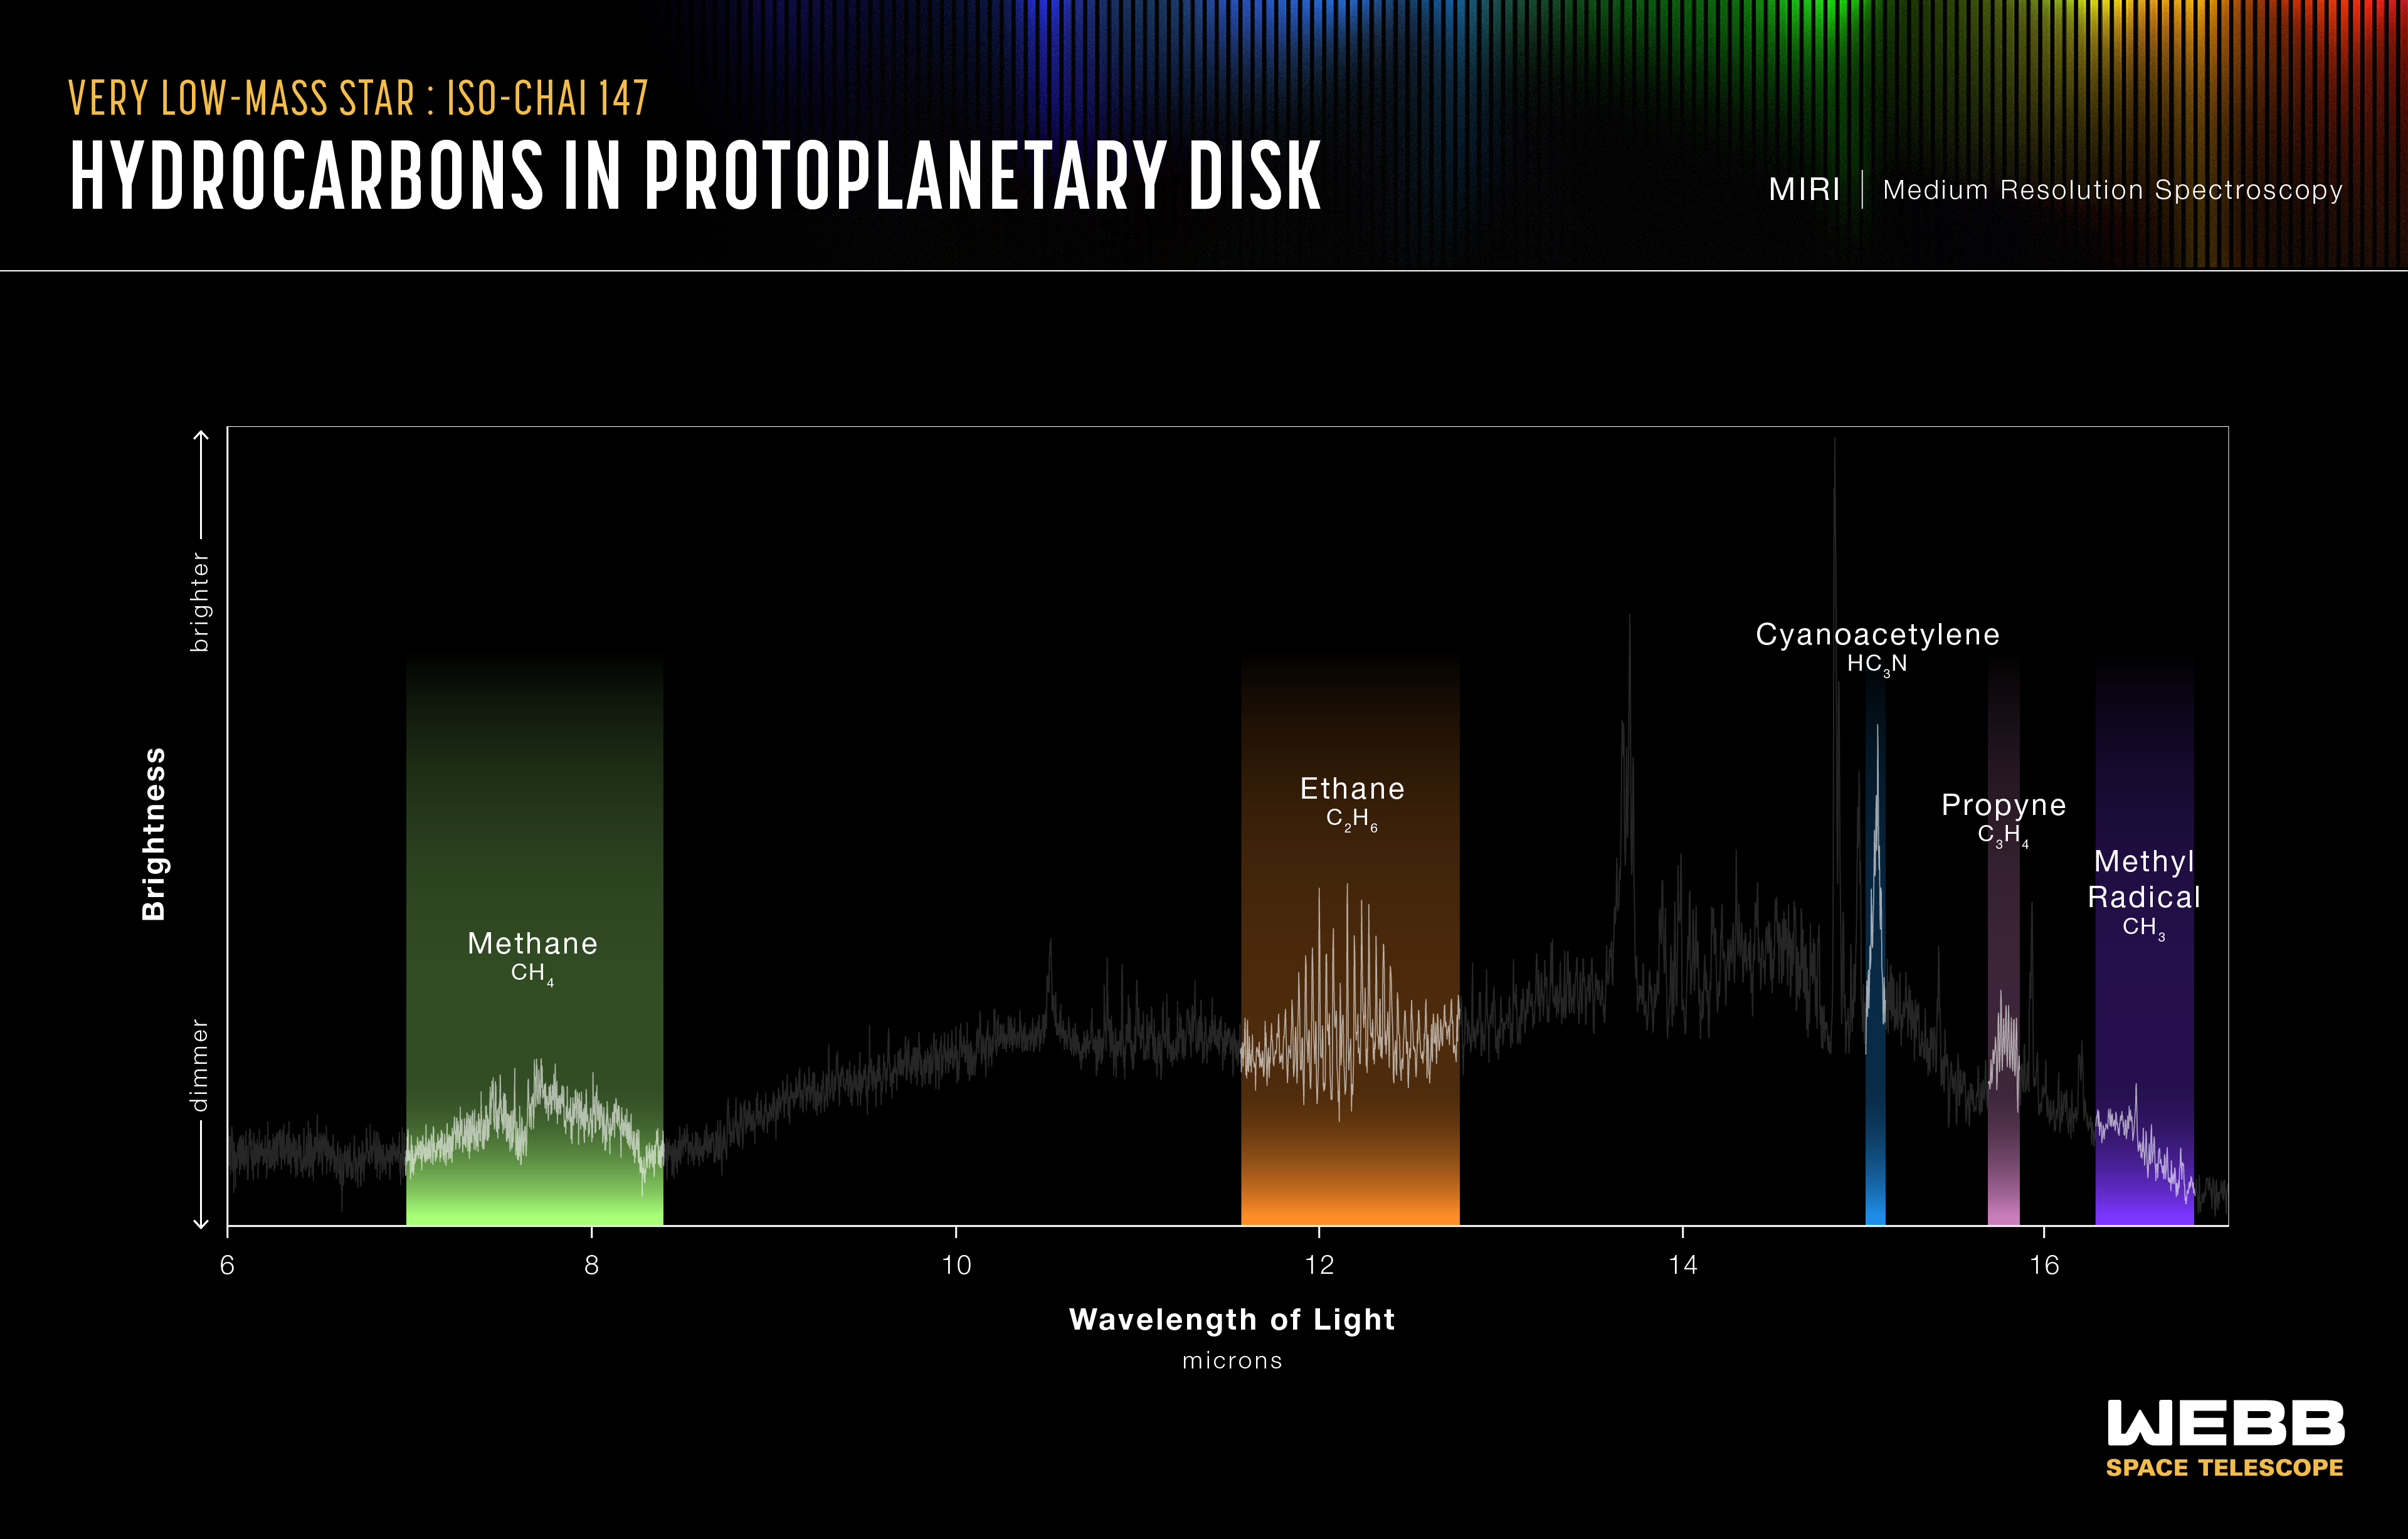

Protoplanetary disc of SO-ChaI 147 (MIRI emission spectrum)

This graphic presents some of the results from the MIRI Mid-INfrared Disk Survey (MINDS), which aims to build a bridge between the chemical inventory of discs and the properties of exoplanets. In a new study, the science team explored the region around a very low-mass star of 0.11 solar masses (known as ISO-ChaI 147). These observations provide insights into the environment as well as basic ingredients for such planets to form. The team found that the gas in the planet-forming region of the star is rich in carbon. This could potentially be because carbon is removed from the solid material from which rocky planets can form, and could explain why Earth is relatively carbon-poor.

The spectrum revealed by Webb’s Mid-InfraRed Instrument (MIRI) shows the richest hydrocarbon chemistry seen to date in a protoplanetary disc, consisting of 13 carbon-bearing molecules up to benzene. This includes the first extrasolar detection of ethane (C2H6), the largest fully-saturated hydrocarbon detected outside our Solar System. Since fully-saturated hydrocarbons are expected to form from more basic molecules, detecting them here gives researchers clues about the chemical environment. The team also successfully detected ethylene (C2H4), propyne (C3H4), and the methyl radical CH3, for the first time in a protoplanetary disc.

This graphic highlights the detections of ethane (C2H6), methane (CH4), propyne (C3H4), cyanoacetylene (HC3N), and the methyl radical CH3.

Credit: NASA, ESA, CSA, R. Crawford (STScI)